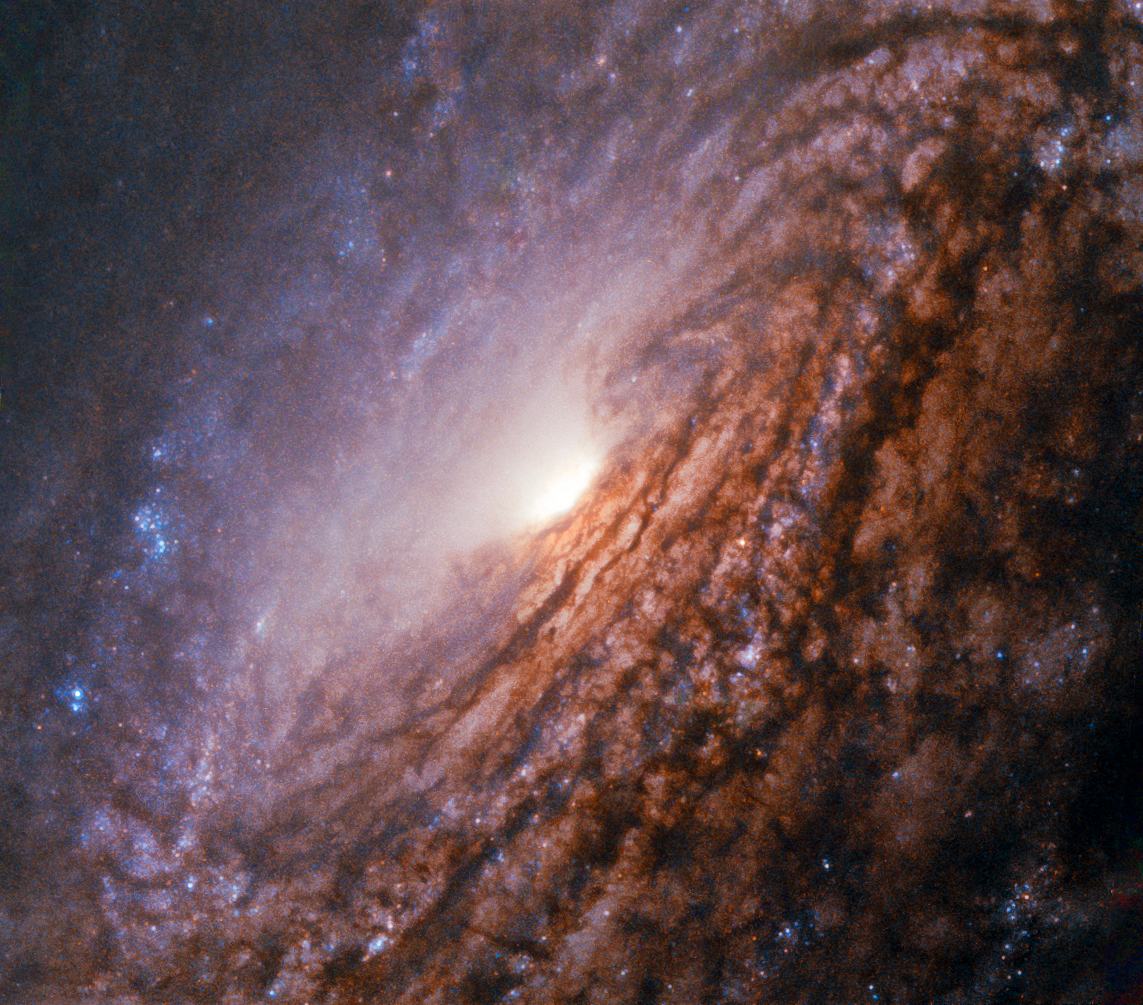

A galaxy with a bright heart

This Picture of the Week shows the unbarred spiral galaxy NGC 5033, located about 40 million light-years away in the constellation of Canes Venatici (The Hunting Dogs). The galaxy is similar in size to our own galaxy, the Milky Way, at just over 100 000 light-years across. Like in the Milky Way NGC 5033’s spiral arms are dotted with blue regions, indicating ongoing star formation. The blue patches house hot, young stars in the process of forming, while the older, cooler stars populating the galaxy’s centre cause it to appear redder in colour.

In contrast to the Milky Way NGC 5033 is missing a central bar. Instead it has a bright and energetic core called an active galactic nucleus, which is powered by a supermassive black hole. This active nucleus gives it the classification of a Seyfert galaxy. Due to the ongoing activity the core of NGC 5033 shines bright across the entire electromagnetic spectrum. This released energy shows that the central black hole is currently devouring stars, dust and gas getting to close to it. As this matters falls onto the supermassive black hole, it radiates in many different wavelengths.

While its relative proximity to Earth makes it an ideal target for professional astronomer to study its active nucleus in more detail, its big apparent size on the night sky and its brightness also makes it a beautiful target for amateur astronomers.

Credit: ESA/Hubble & NASA Acknowledgement: Judy Schmidt